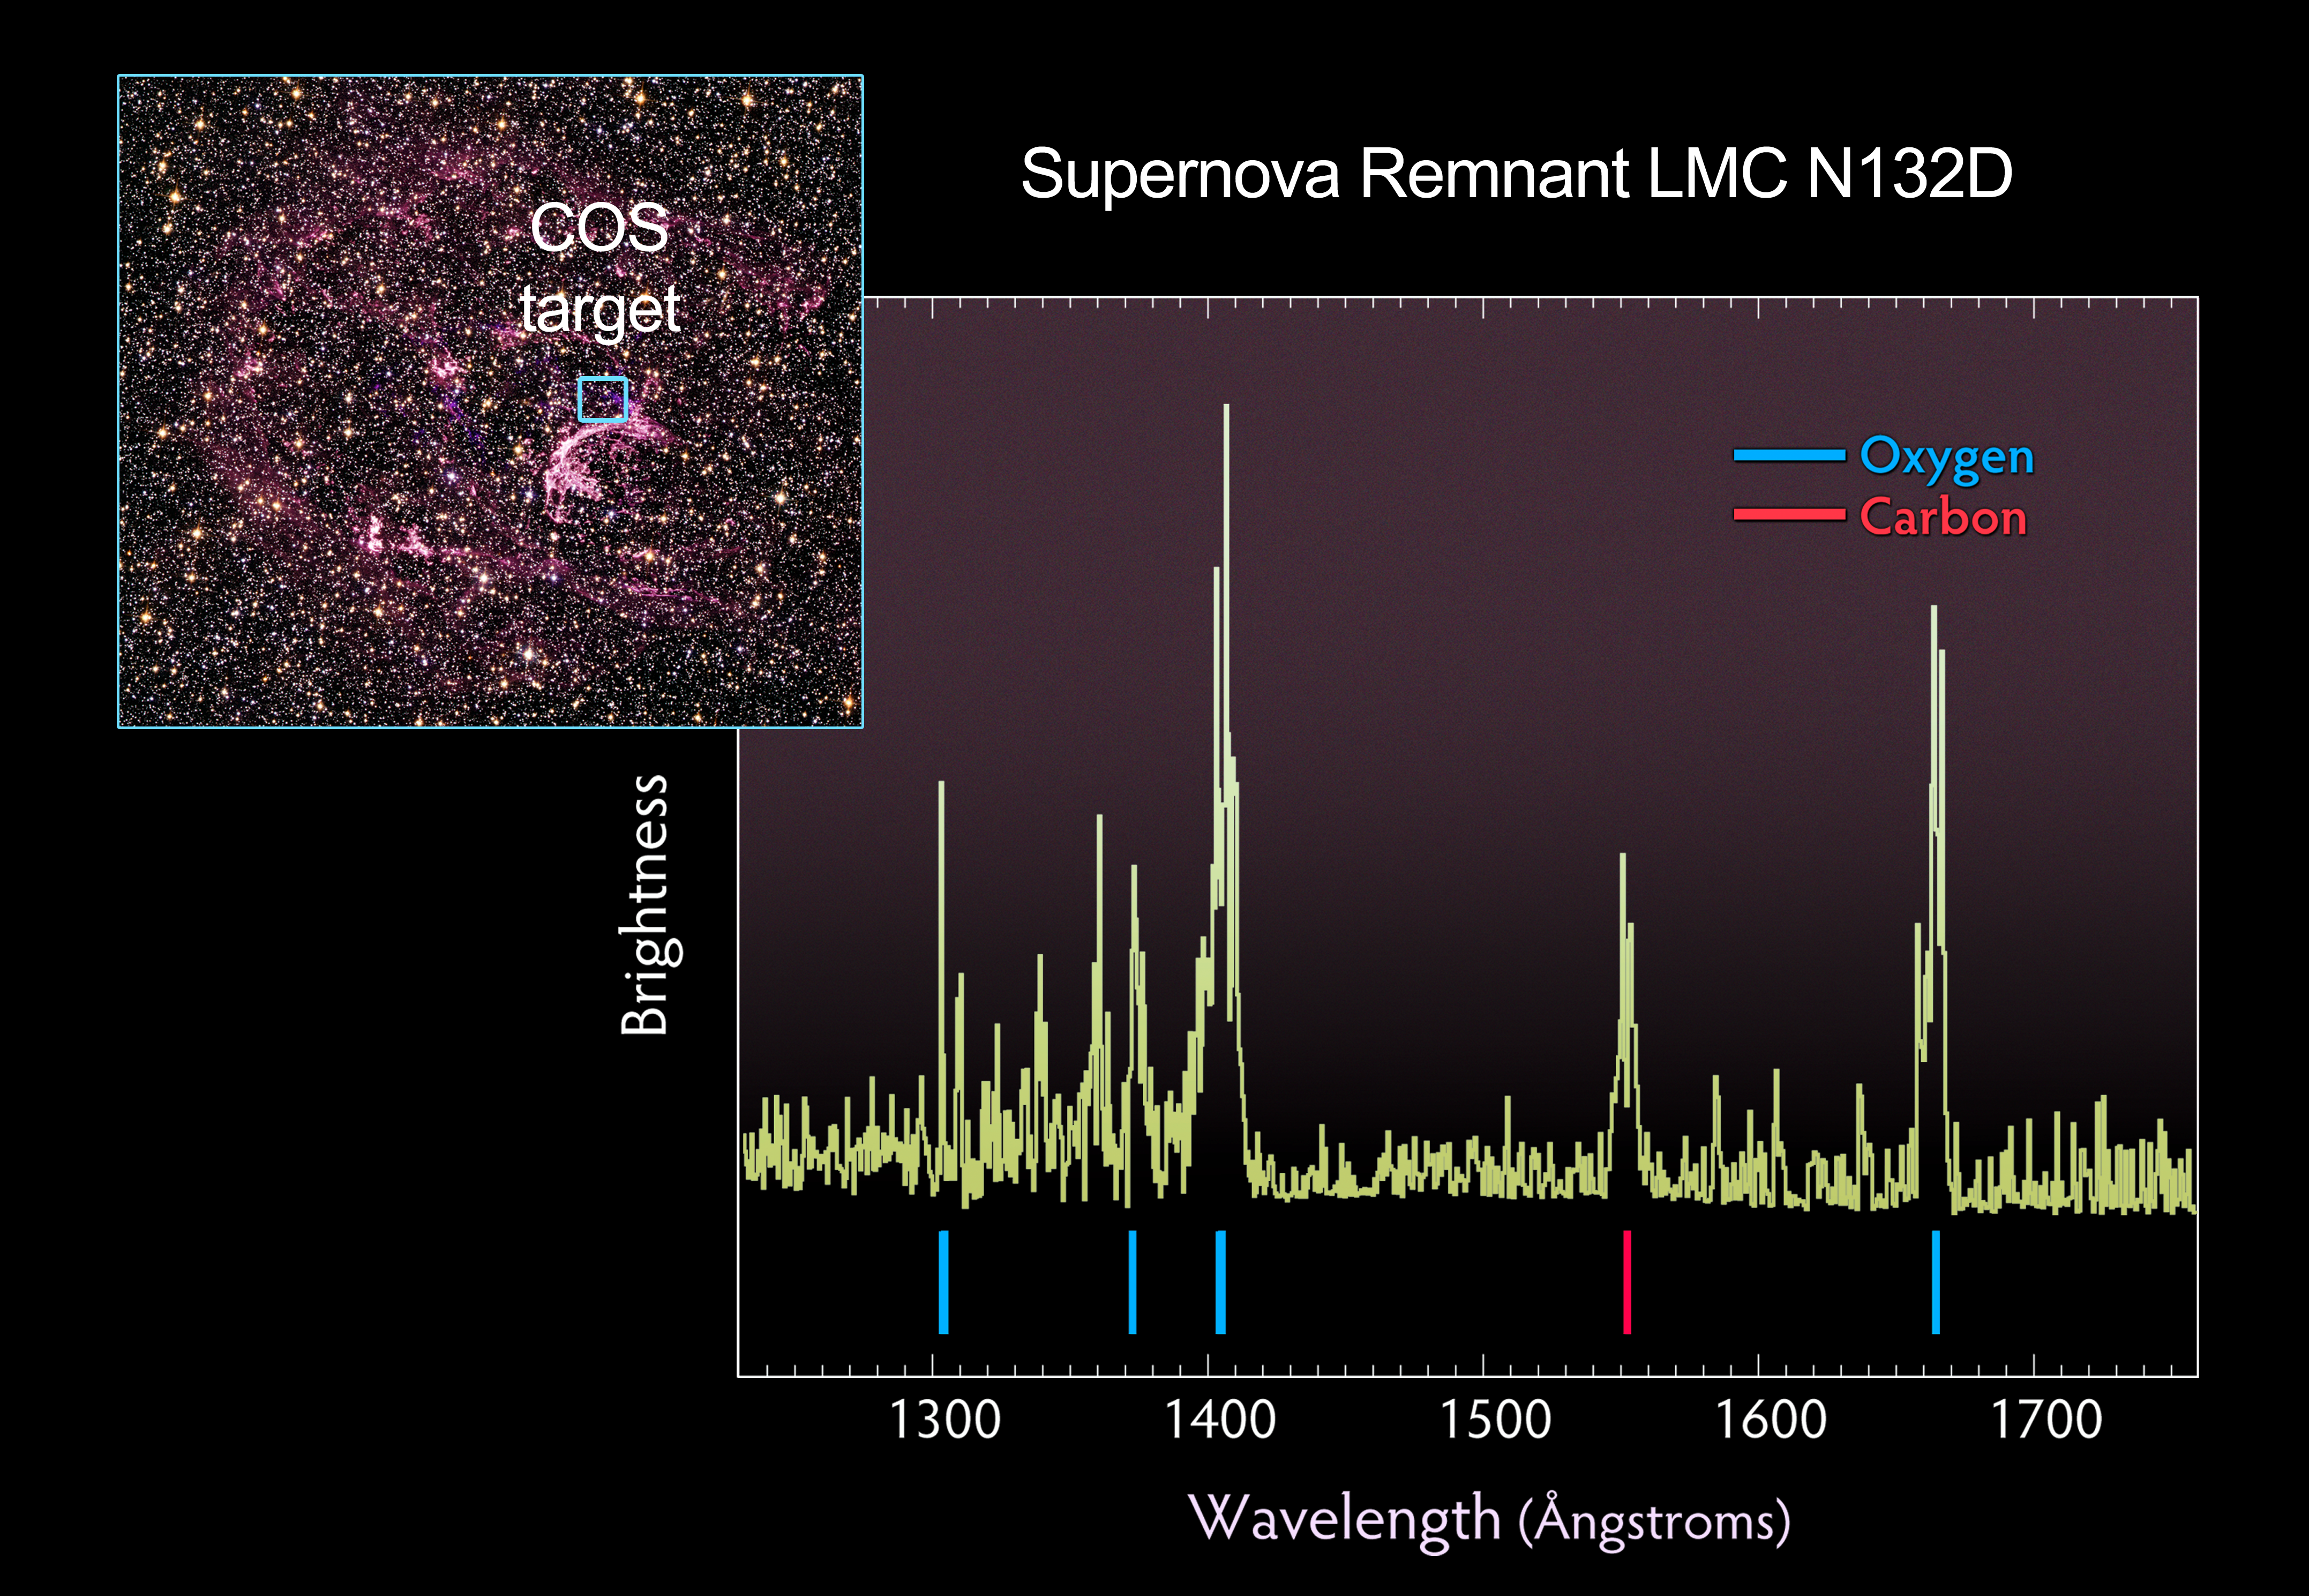

Supernova remnant N132D with COS spectrum

The wispy, glowing, magenta structures in this NASA/ESA Hubble Space Telescope image are the remains of a star 10 to 15 times the mass of the Sun, which we would have seen exploding as a supernova 3000 years ago. The remnant's fast-moving gas is ploughing into the surrounding gas of the galaxy, creating a supersonic shock wave in the surrounding medium and making the material glow.

The Hubble visible-light image reveals, deep within the remnant, a crescent-shaped cloud of pink emission from hydrogen gas and soft purple wisps that correspond to regions of glowing oxygen. A dense background of colourful stars is also visible.

Probing this tattered gaseous relic, the newly installed Cosmic Origins Spectrograph (COS) aboard the NASA/ESA Hubble Space Telescope detected pristine gas ejected by the doomed star that has not yet mixed with the gas in the interstellar medium. The supernova remnant, called N132D, resides in the Large Magellanic Cloud, a small companion galaxy of the Milky Way located 170 000 light-years away. The resulting spectrum, taken in ultraviolet light, shows glowing oxygen and carbon in the remnant.

These results allow astronomers to better understand why some stars form an abundance of certain elements, like oxygen, but not others.

Ultraviolet light is blocked by Earth's atmosphere, so the observation of N132D in the ultraviolet requires the use of the space-borne Hubble. The broadest range of spectral signatures of the glowing gas appear in the ultraviolet, allowing astronomers to determine the quantities, or abundances, of key elements such as oxygen, as well as elements whose abundances cannot be traced from visible-light images, including carbon, magnesium and silicon. Previous ultraviolet instruments on Hubble were not sensitive enough to distinguish between the unmixed ejecta, fresh from the supernova, and the "shocked" gas of the surrounding interstellar medium.

Supernova remnants provide a rare opportunity to search for the material hidden deep inside a star. This in turn yields information on how stars evolve and how they manufacture chemicals in their interiors. Supernova explosions also enrich the interstellar medium with new chemical elements, which are incorporated into future generations of stars.

The COS observations were made on 10 August 2009. COS was installed by NASA astronauts in May 2009, during the Servicing Mission to upgrade and repair the 19-year-old Hubble.

The visible-light image was taken on 2 August 2009 with Hubble's new Wide Field Camera 3 (WFC3). A filter that isolates emission from sulphur was combined with archival data from the Advanced Camera for Surveys (ACS). The ACS data include colour filters that sample starlight in the blue, green and red portions of the spectrum, as well as the pink emission from glowing hydrogen gas.

These Hubble observations of the N132D are part of the Hubble Servicing Mission 4 Early Release Observations.

Credit: NASA, ESA and the Hubble SM4 ERO Team